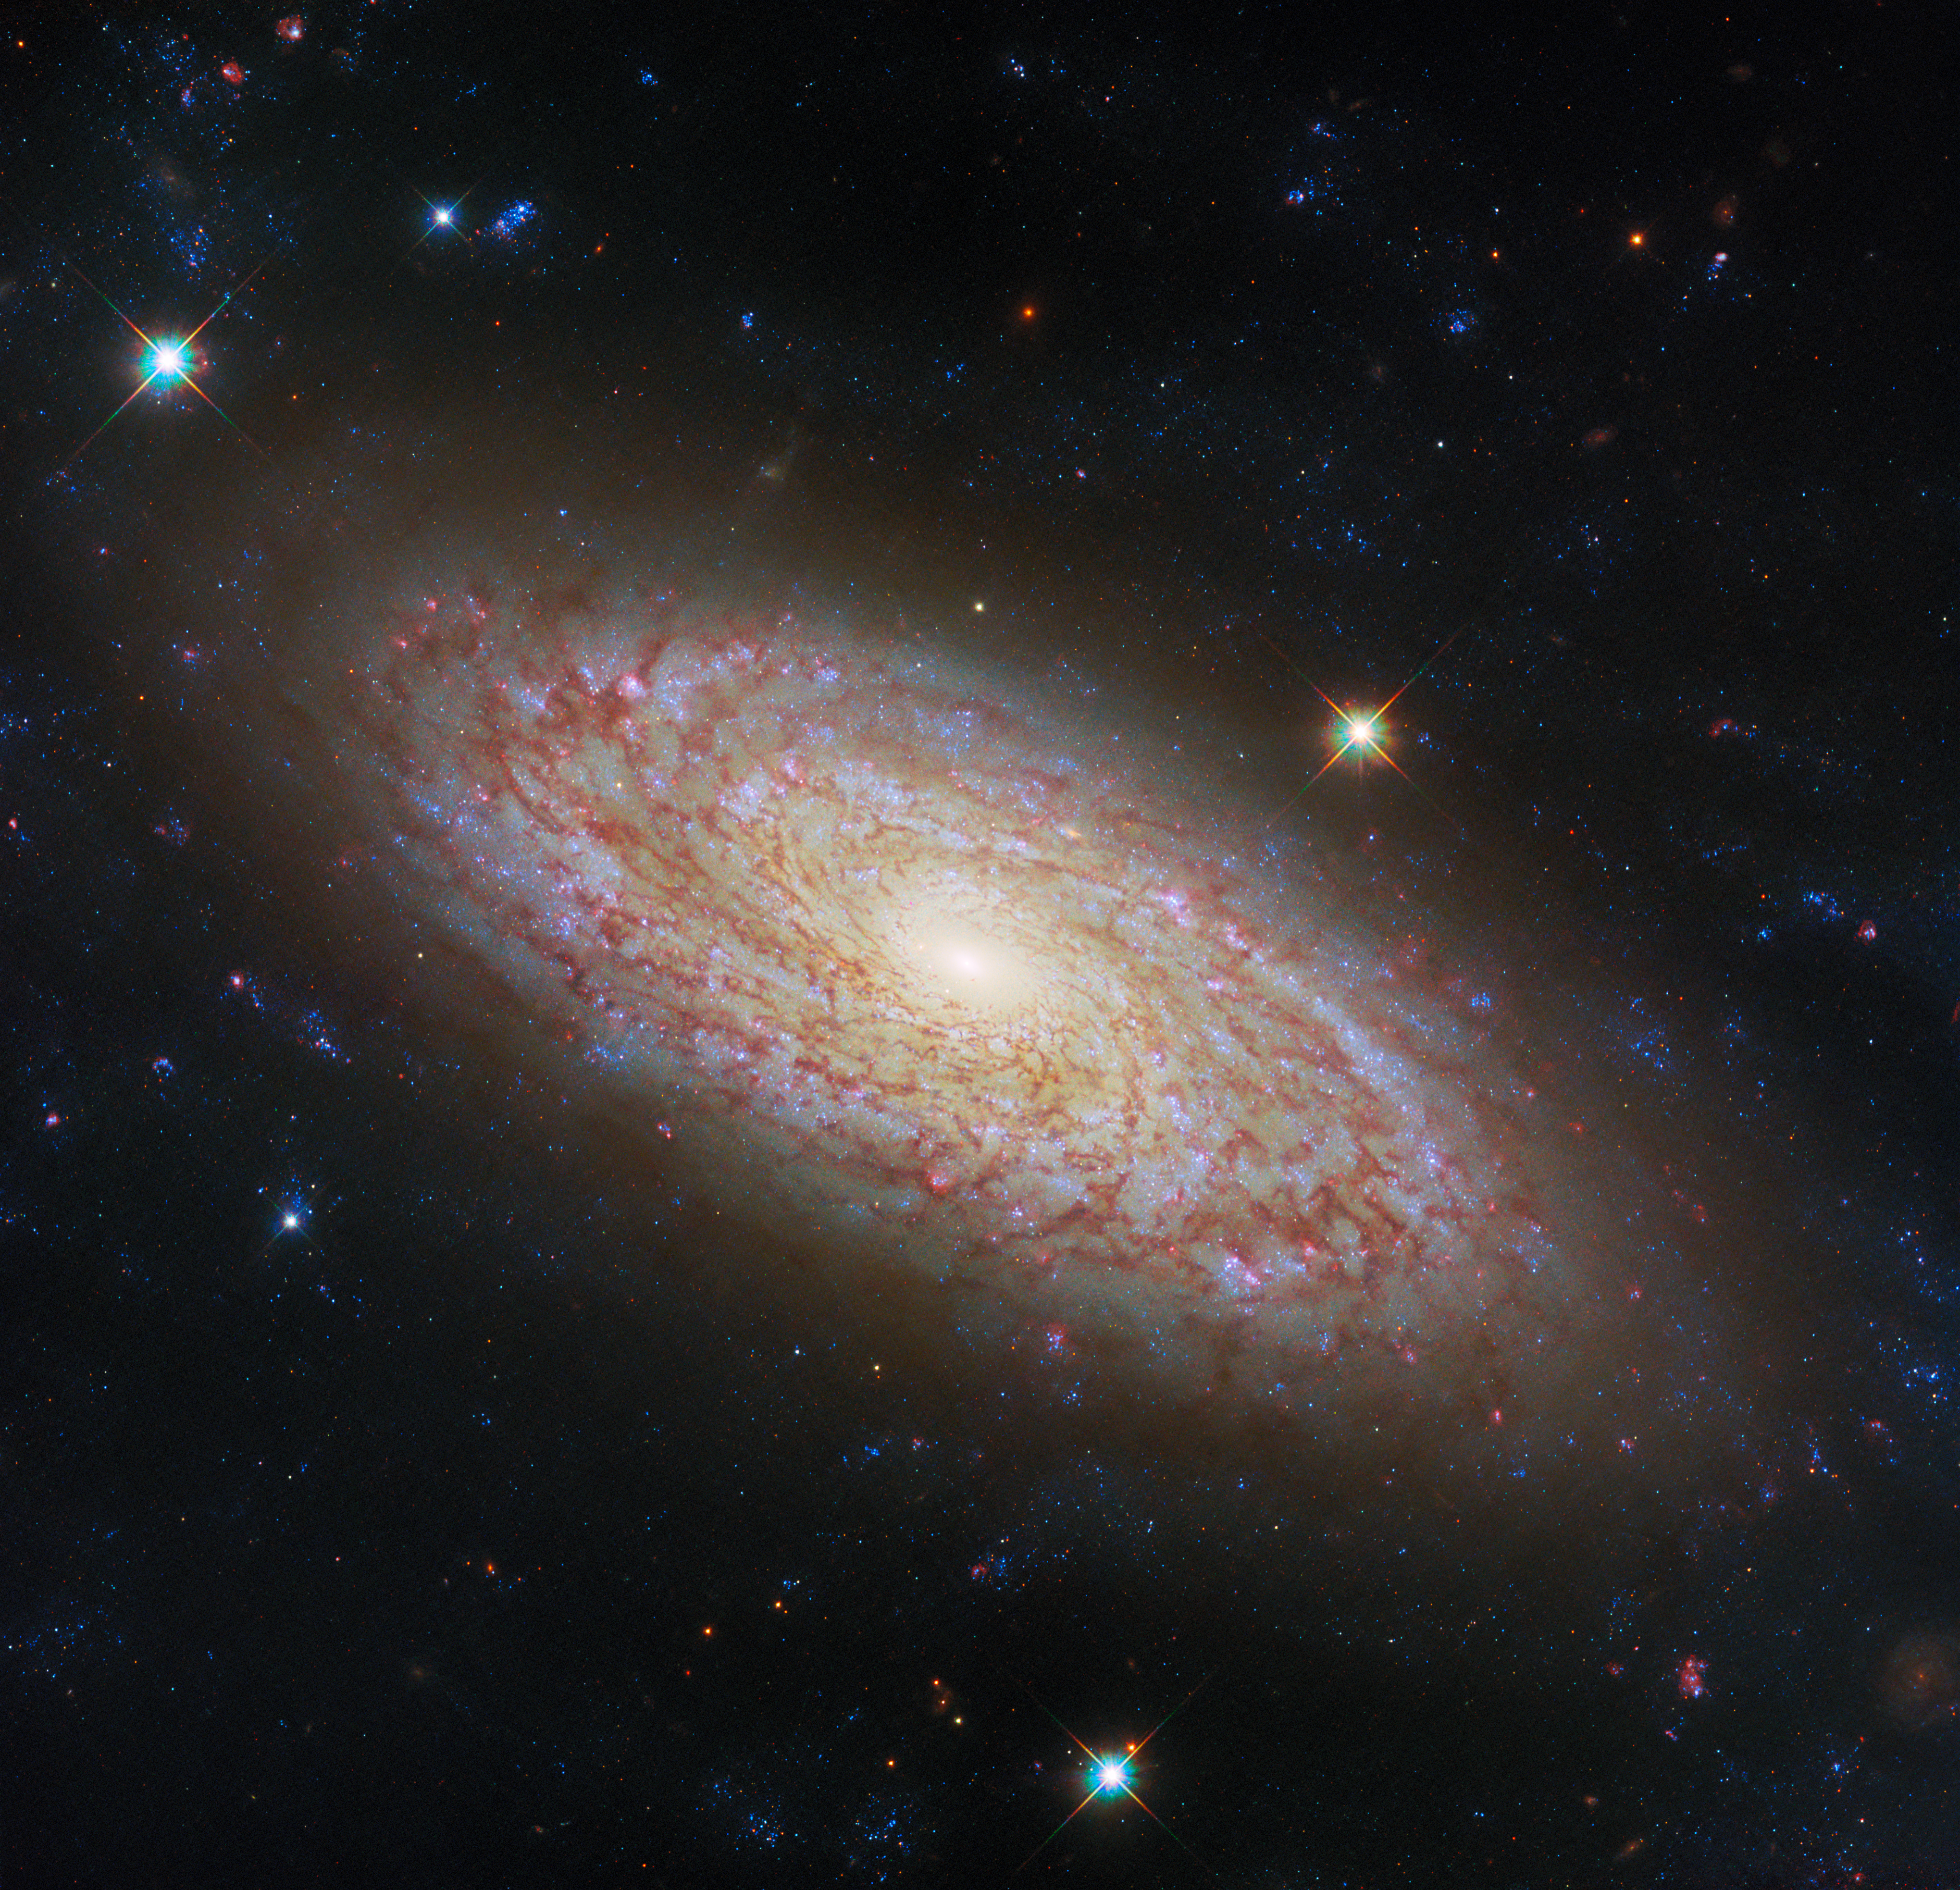

Viewing a flaky disc

Featured in this new NASA/ESA Hubble Space Telescope Picture of the Week is the spiral galaxy NGC 2090, located in the constellation Columba.

This galaxy is notable as a part of the group of galaxies studied in Hubble’s Extragalactic Distance Scale Key Project, which aimed to determine a new state-of-the-art value for the Hubble constant, one of the then-new telescope’s primary science goals. The contribution of NGC 2090 was in calibrating the Tully-Fisher (TF) distance method, by observing Cepheid variable stars in the galaxy. The Cepheid-based measurement from that study in 1998 put NGC 2090 as 37 million light-years away; the newest measurement from 2020, using the TF method, has NGC 2090 slightly farther away, at 40 million light-years.

Before and since that project, NGC 2090 has been well studied as a very prominent nearby example of star formation. It has been described as a flocculent spiral, meaning a spiral galaxy with a patchy, dusty disc and arms that are flaky or not visible at all. This Hubble image shows well why NGC 2090 earned that description, but its spiral arms do appear among the dust as winding lanes of light.

NGC 2090 is a galaxy still full of activity, with clusters of star formation at various stages of evolution spread across the disc. Examining star formation and the movement of matter in galaxies was the motivation for these Hubble observations, taken in October of this year. Likewise Hubble’s partner in space astronomy, the NASA/ESA/CSA James Webb Space Telescope, has also spied on this galaxy to add infrared data to this overall picture of galaxy evolution.

Credit: ESA/Hubble & NASA, D. Thilker